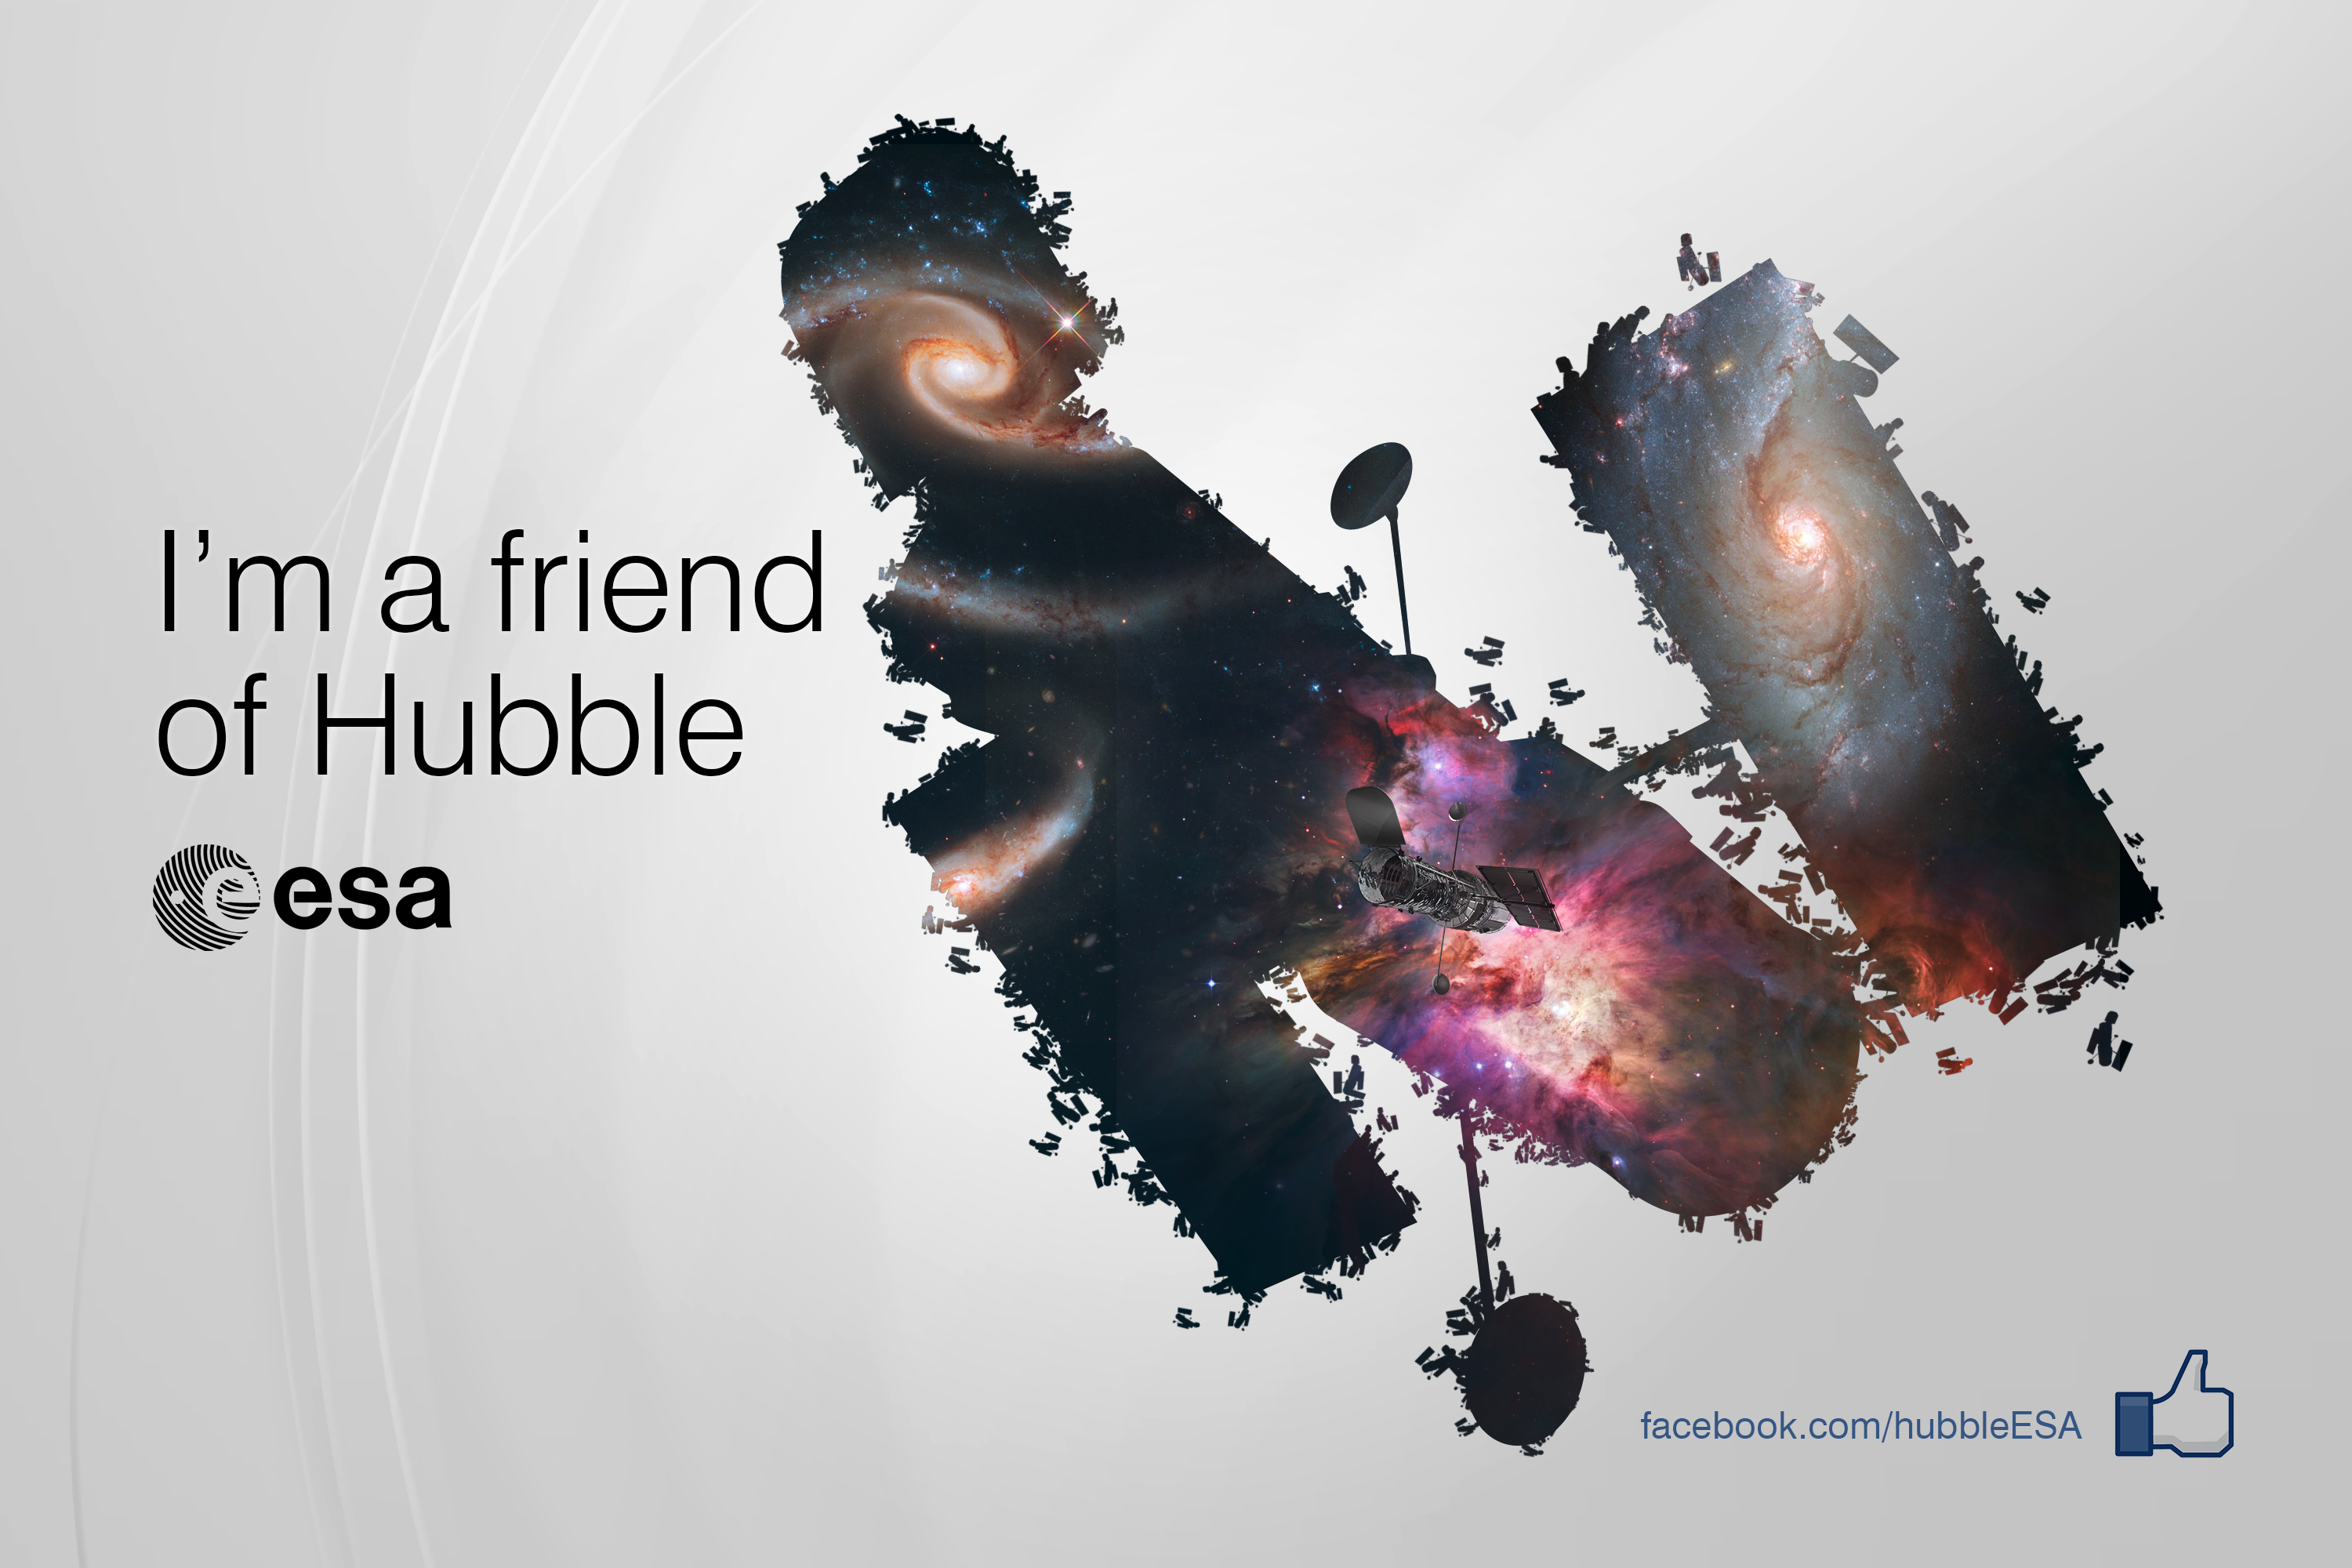

ESA/Hubble reaches 100 000 Facebook friends

ESA’s Facebook community for the Hubble Space Telescope has recently welcomed its 100 000th member. We would like to thank all our friends for their curiosity about space, their interest in the Hubble Space Telescope and their support in sharing the wonders of the Universe with the world. To illustrate the important role that every Facebook friend plays, ESA/Hubble is launching a “Hubble’s Friends” campaign. Read the details in the announcement.

Credit: NASA & ESA